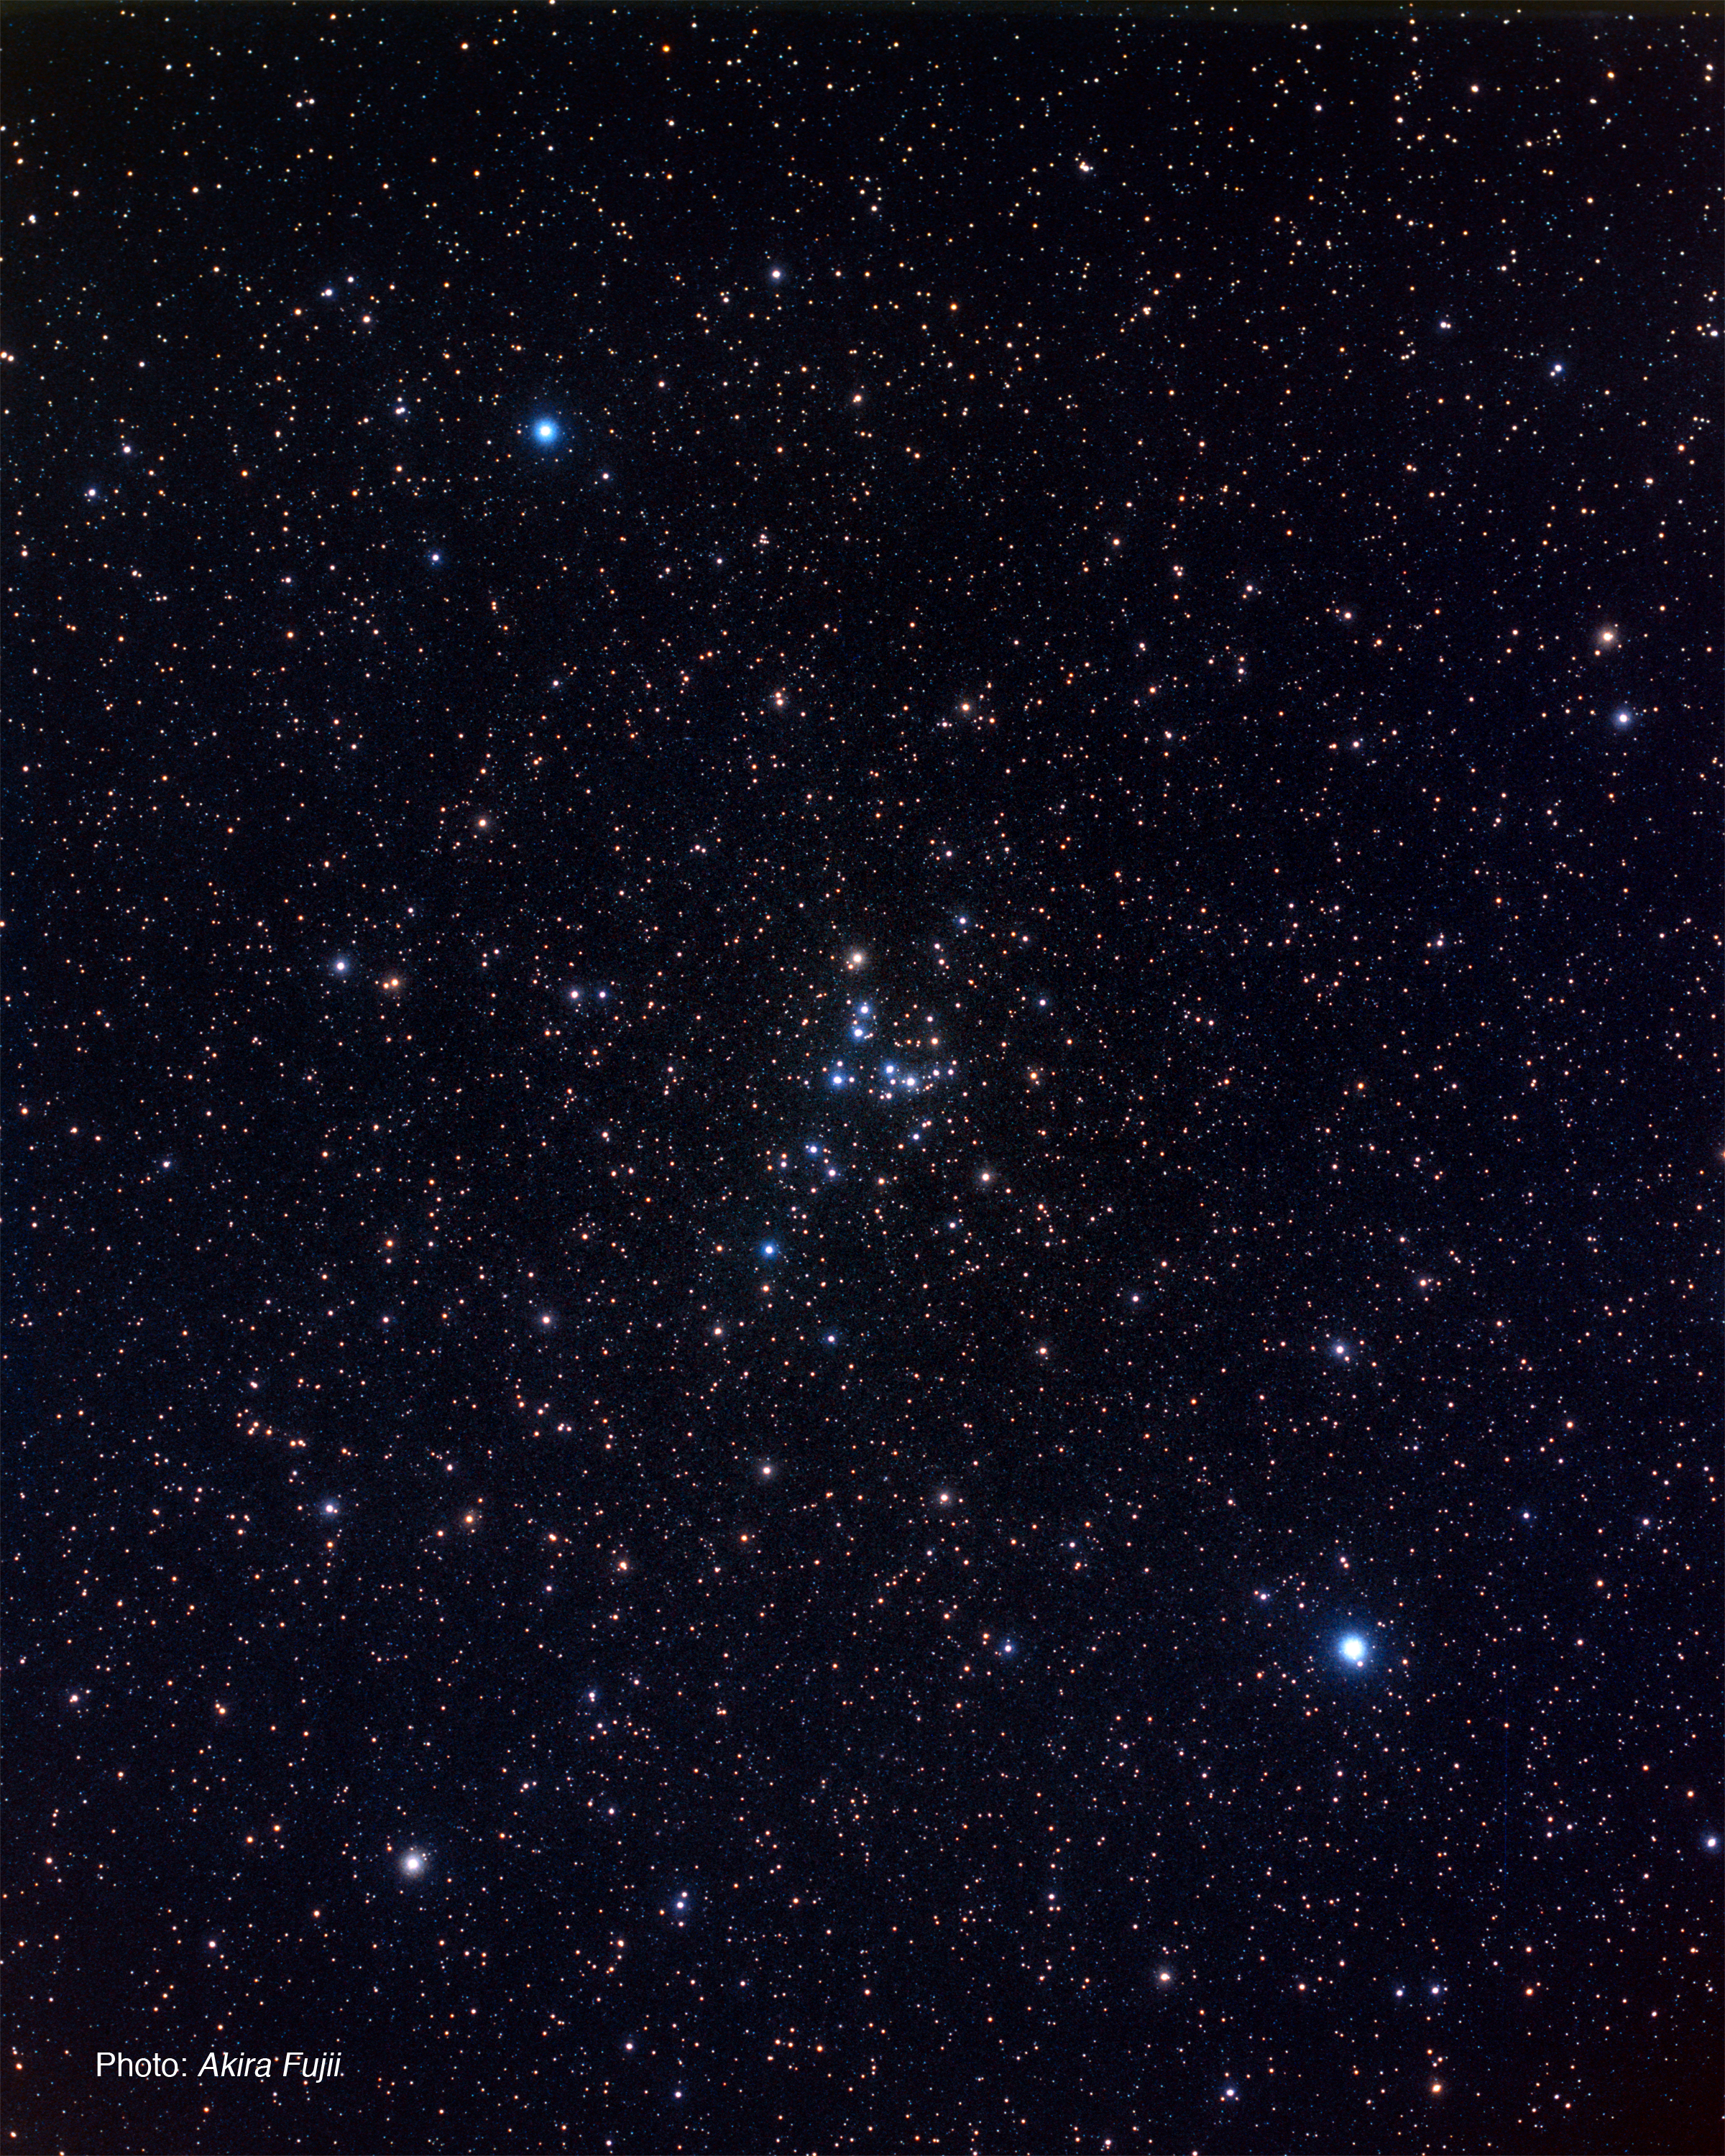

Constellation of Virgo and Coma Berenices (ground-based image)

The Virgo Cluster of galaxies is located about 60 million light-years away in the direction of the constellation Virgo. Virgo and other nearby constellations are seen in this ground-based image.

Credit: A. Fujii and Z. Levay (STScI)